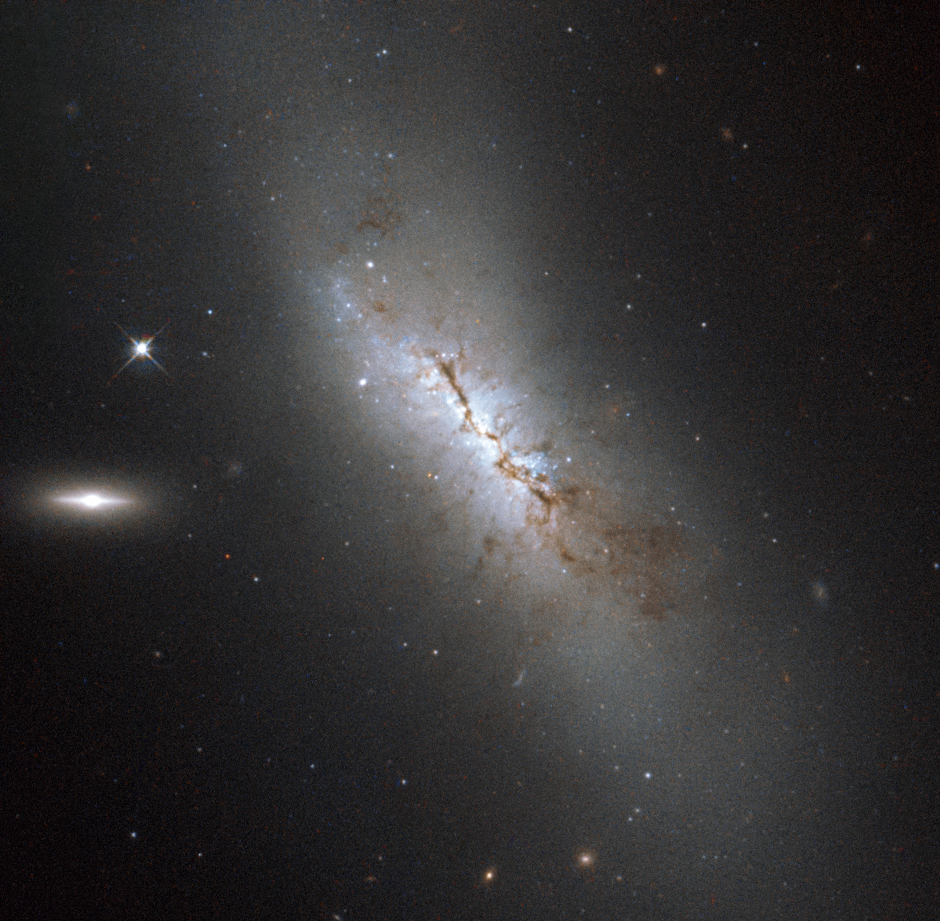

A galactic cloak for an exploding star

The galaxy pictured here is NGC 4424, located in the constellation of Virgo. It is not visible with the naked eye but has been captured here with the NASA/ESA Hubble Space Telescope.

Although it may not be obvious from this image, NGC 4424 is in fact a spiral galaxy. In this image it is seen more or less edge on, but from above you would be able to see the arms of the galaxy wrapping around its centre to give the characteristic spiral form .

In 2012 astronomers observed a supernova in NGC 4424 — a violent explosion marking the end of a star’s life. During a supernova explosion, a single star can often outshine an entire galaxy. However, the supernova in NGC 4424, dubbed SN 2012cg, cannot be seen here as the image was taken ten years prior to the explosion. Along the central region of the galaxy, clouds of dust block the light from distant stars and create dark patches.

To the left of NGC 4424 there are two bright objects in the frame. The brightest is another, smaller galaxy known as LEDA 213994 and the object closer to NGC 4424 is an anonymous star in our Milky Way.

A version of this image was entered into the Hubble's Hidden Treasures image processing competition by contestant Gilles Chapdelaine.

Credit: ESA/Hubble & NASA Acknowledgement: Gilles Chapdelaine